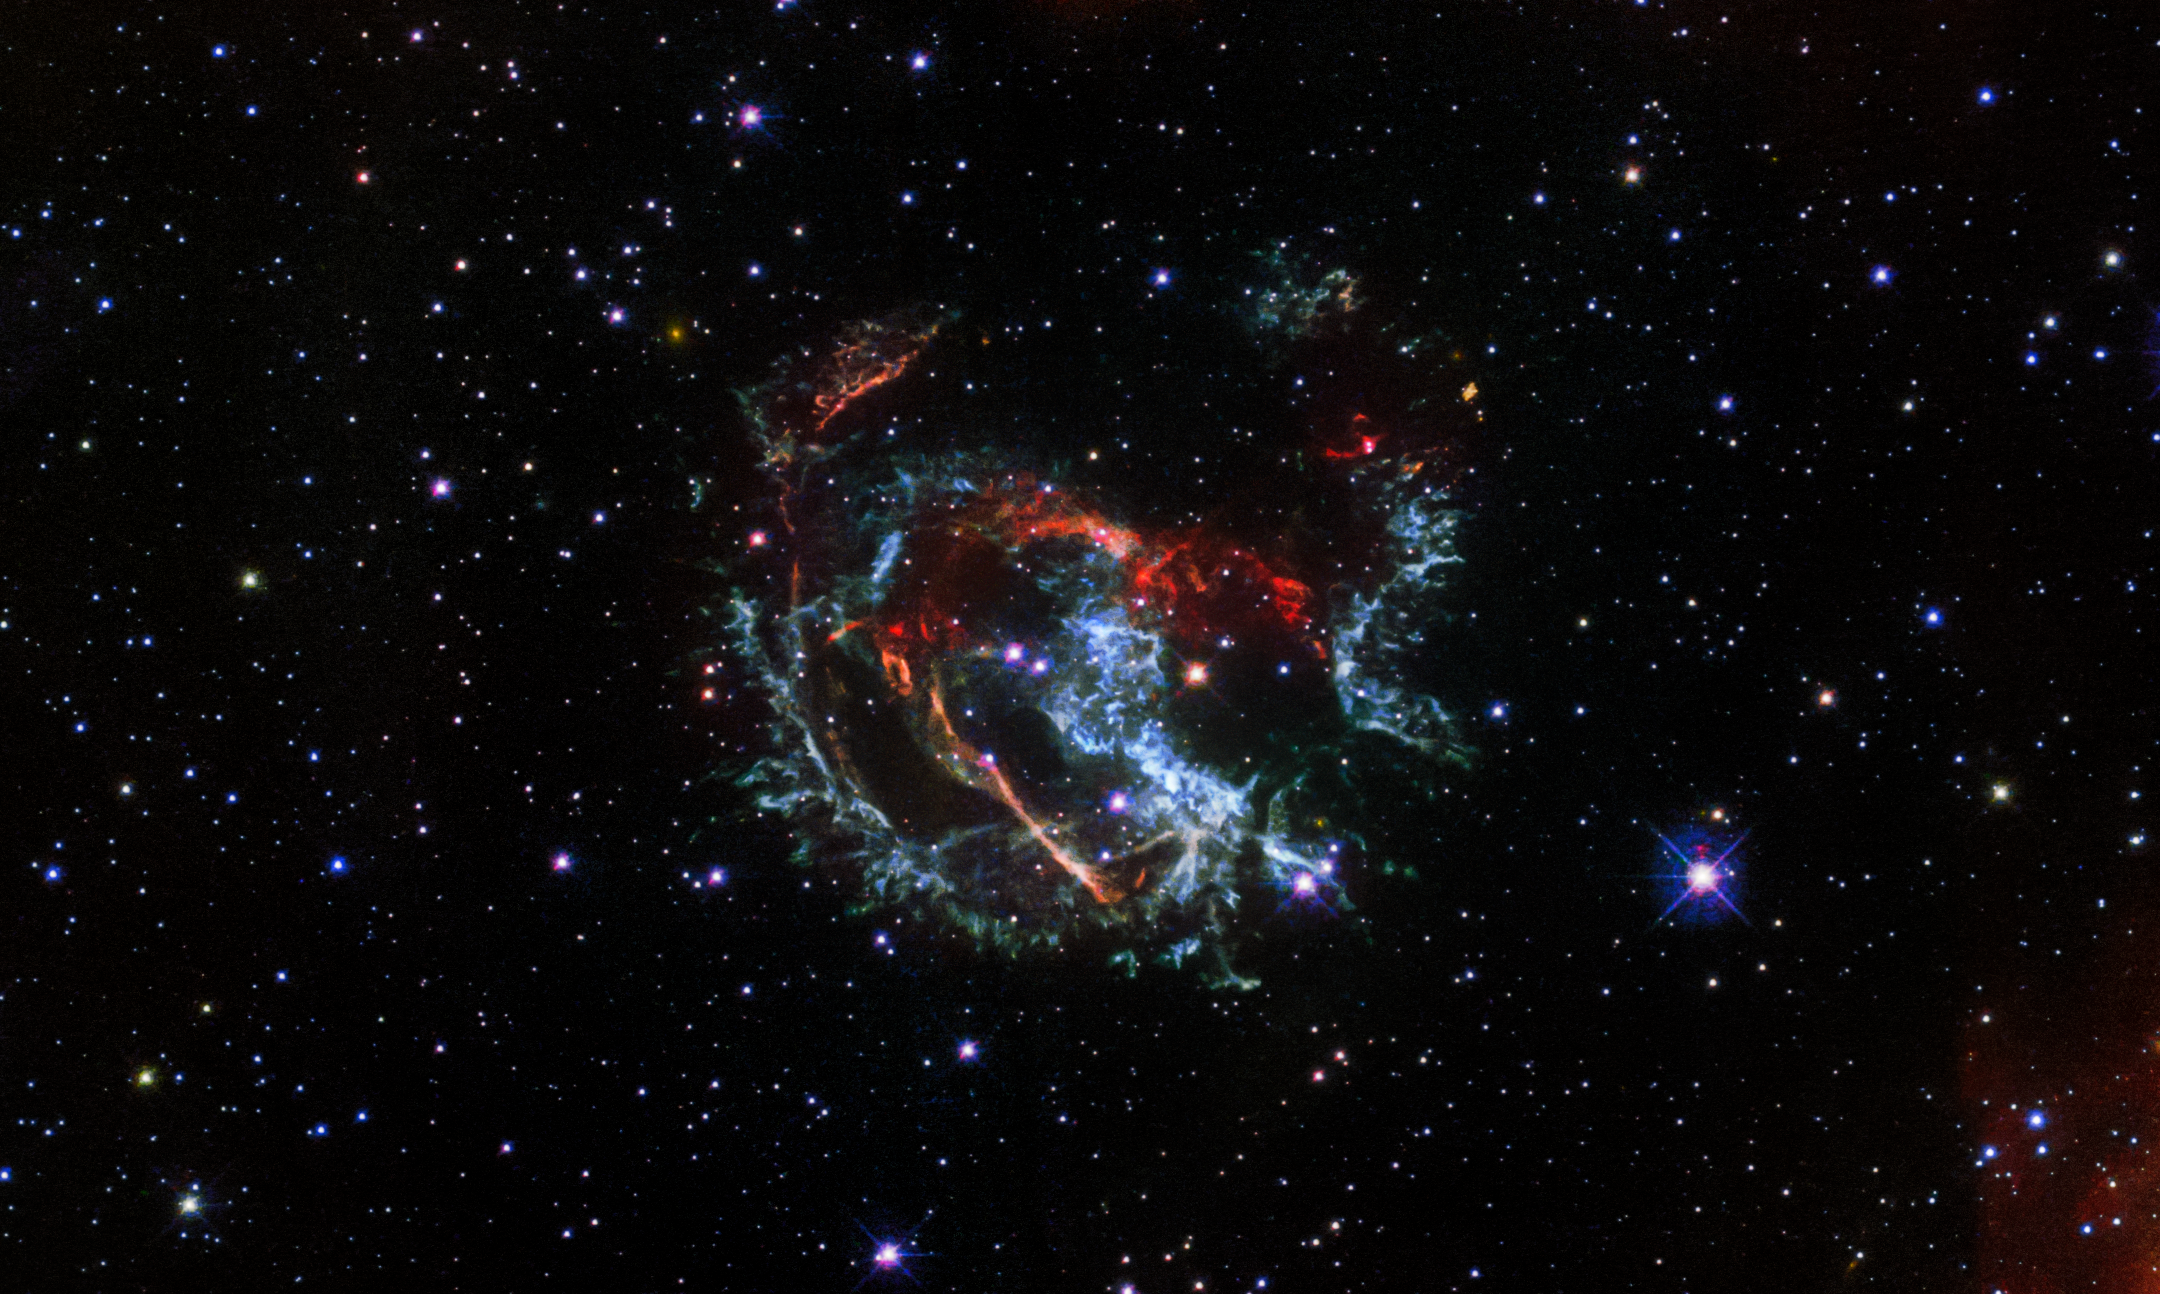

Hubble Captures the Supernova Remnant 1E 0102.2-7219

Featured in this Hubble image is an expanding, gaseous corpse — a supernova remnant — known as 1E 0102.2-7219. It is the remnant of a star that exploded long ago in the Small Magellanic Cloud, a satellite galaxy of our Milky Way located roughly 200 000 light-years away.

Because the gaseous knots in this supernova remnant are moving at different speeds and directions from the supernova explosion, those moving toward Earth are colored blue in this composition and the ones moving away are shown in red. This new Hubble image shows these ribbons of gas speeding away from the explosion site at an average speed of 3.2 million kilometers per hour. At that speed, you could travel to the Moon and back in 15 minutes.

Credit: NASA, ESA, and J. Banovetz and D. Milisavljevic (Purdue University)